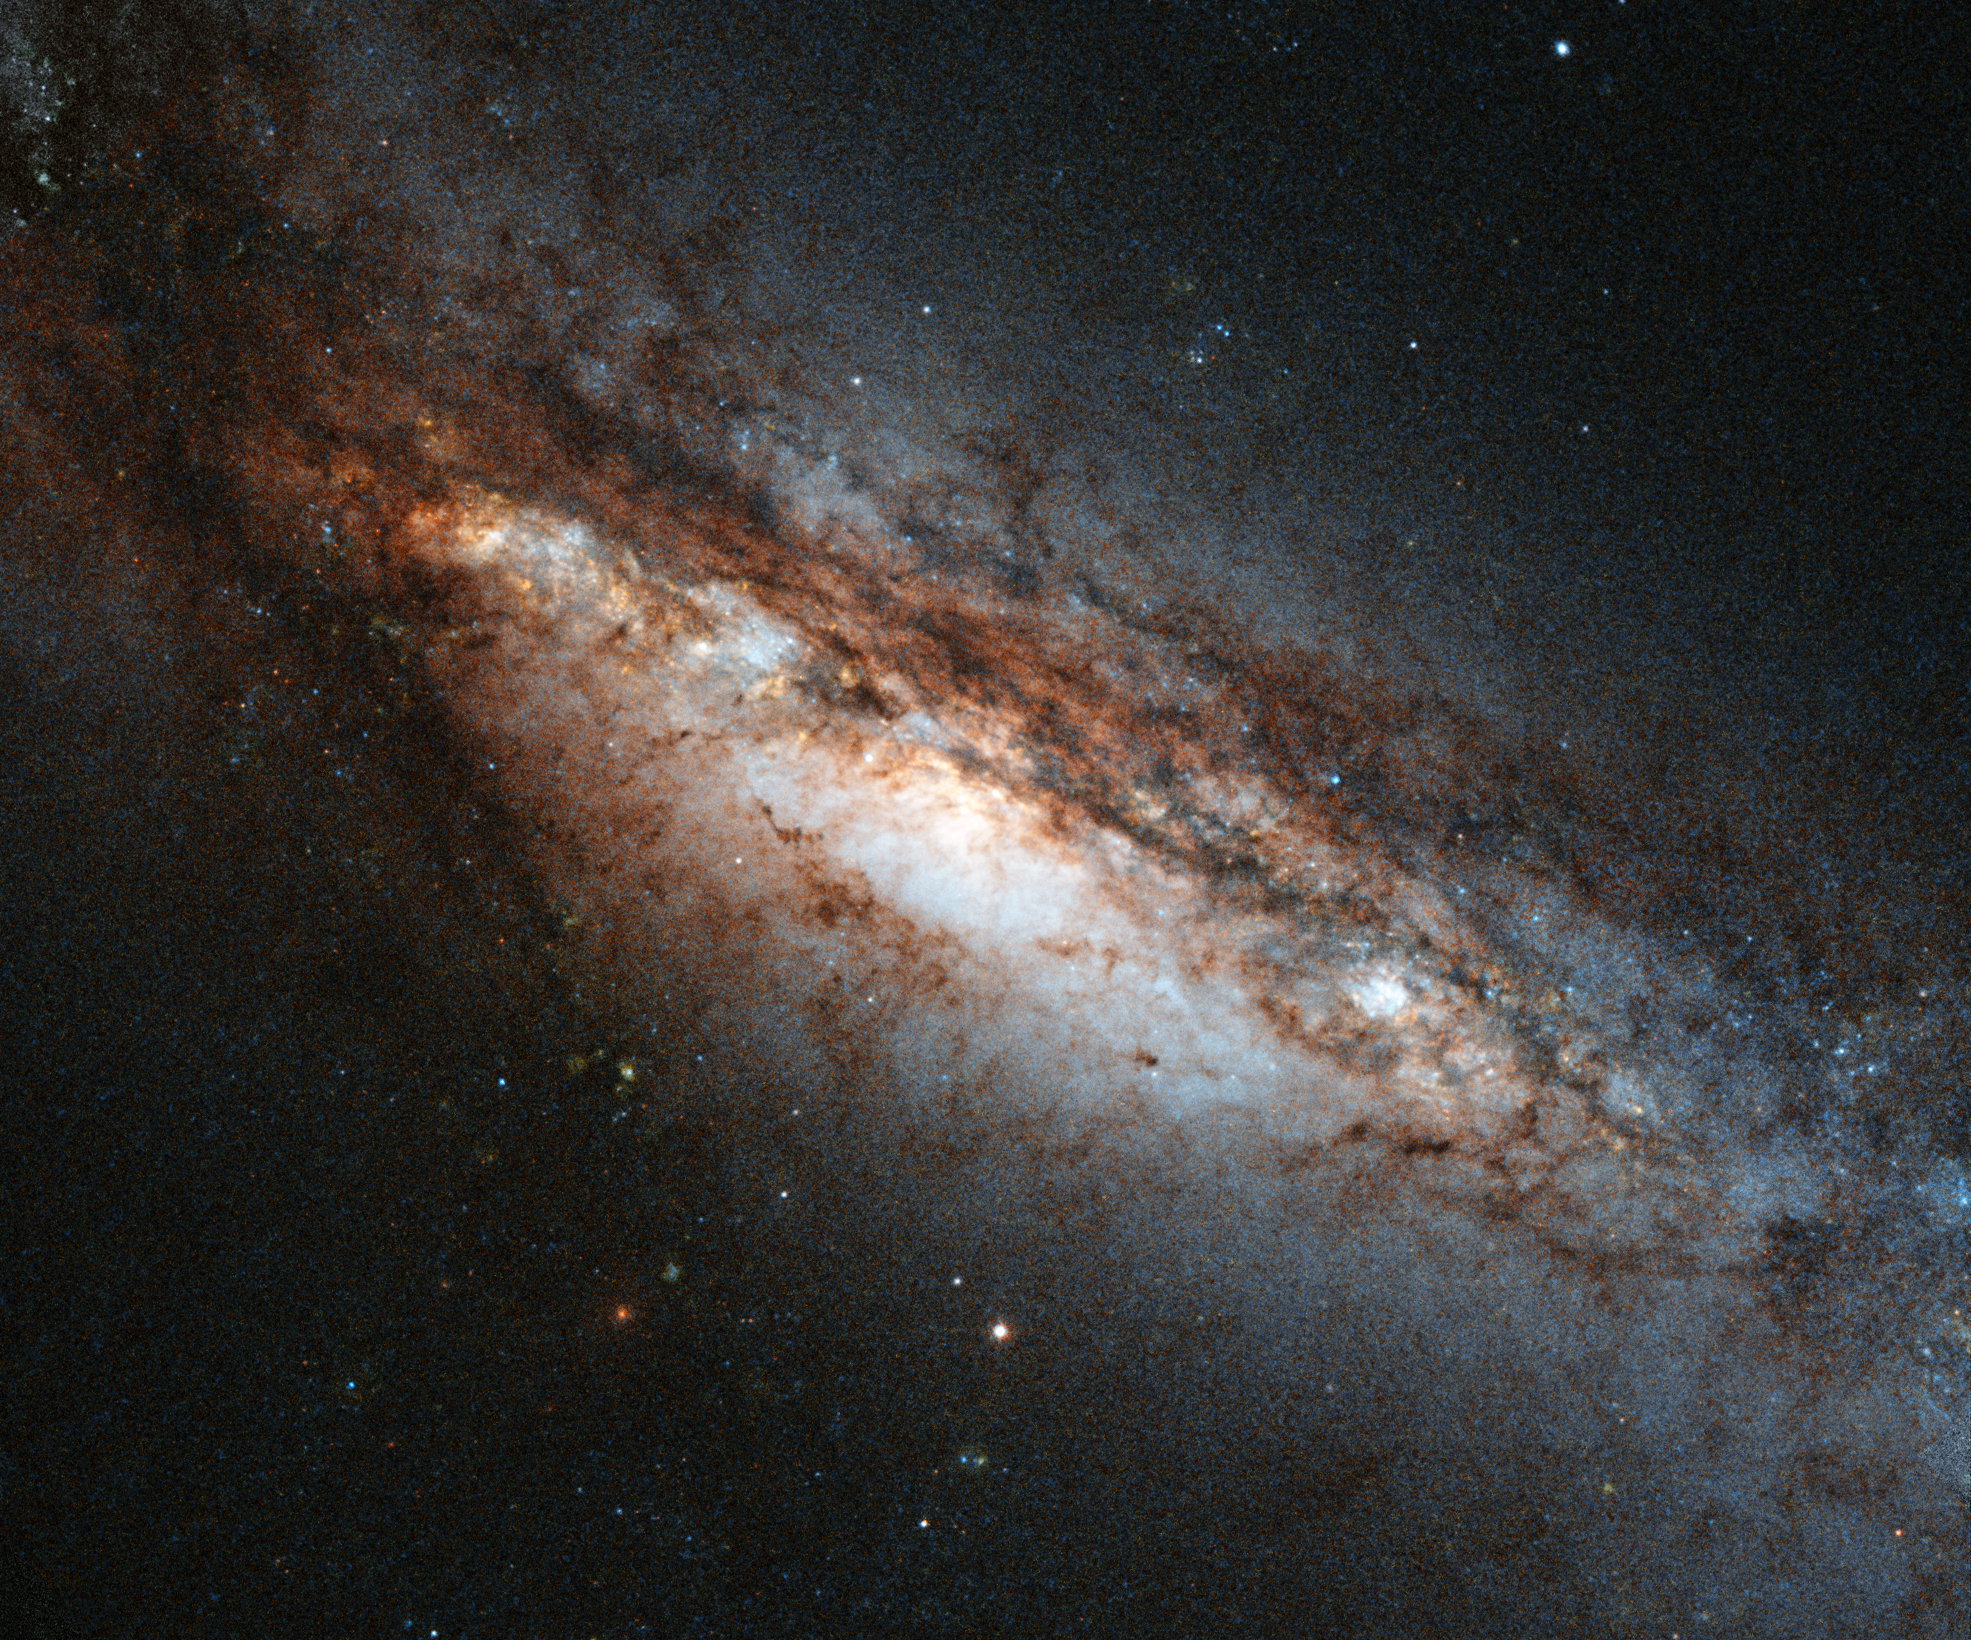

A bizarre cosmic rarity: NGC 660

This new Hubble image shows a peculiar galaxy known as NGC 660, located around 45 million light-years away from us.

NGC 660 is classified as a "polar ring galaxy", meaning that it has a belt of gas and stars around its centre that it ripped from a near neighbour during a clash about one billion years ago. The first polar ring galaxy was observed in 1978 and only around a dozen more have been discovered since then, making them something of a cosmic rarity.

Unfortunately, NGC 660’s polar ring cannot be seen in this image, but has plenty of other features that make it of interest to astronomers – its central bulge is strangely off-kilter and, perhaps more intriguingly, it is thought to harbour exceptionally large amounts of dark matter. In addition, in late 2012 astronomers observed a massive outburst emanating from NGC 660 that was around ten times as bright as a supernova explosion. This burst was thought to be caused by a massive jet shooting out of the supermassive black hole at the centre of the galaxy.

A version of this image was entered into the Hubble's Hidden Treasures image processing competition by contestant Brian Campbell.

Credit: ESA/Hubble & NASA